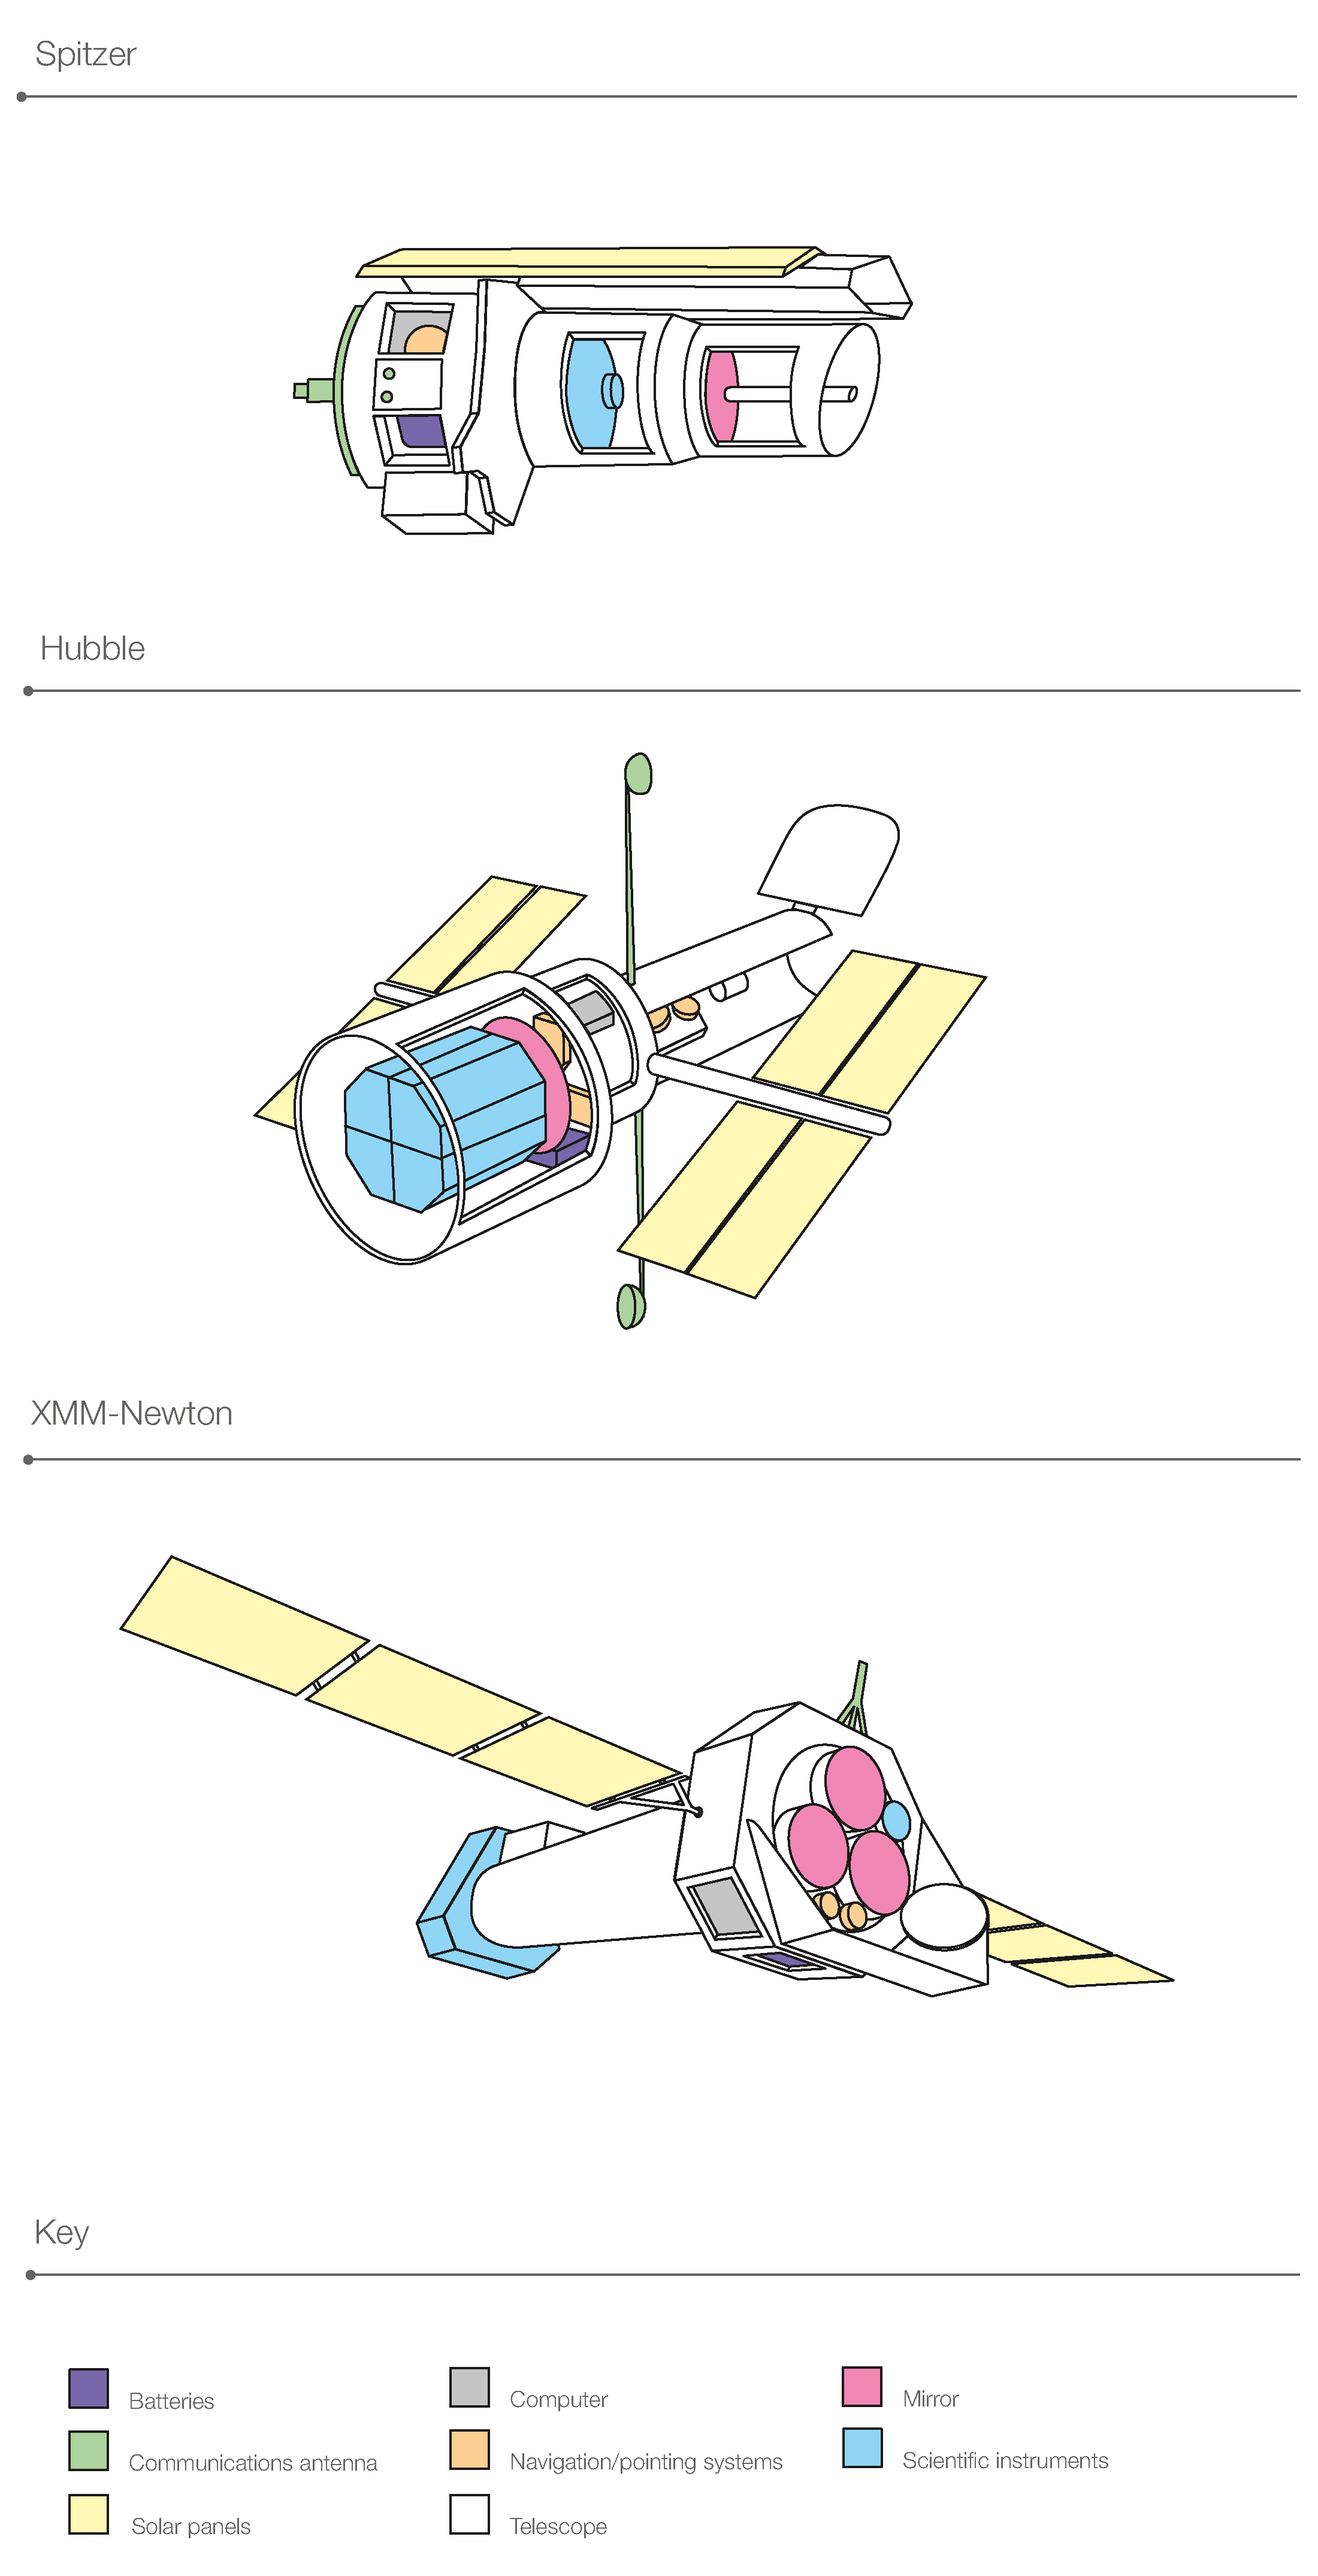

Breaking down space telescopes

This diagram shows the structures of three space telescopes: the NASA Spitzer Space Telescope, the NASA/ESA Hubble Space Telescope, and ESA's XMM-Newton. The components of each telescope are colour-coded.

Credit: NASA & ESA